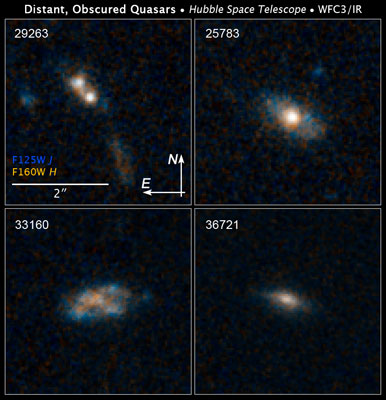

Compass and scale image

Quasars are the brilliant beacons of light that are powered by black holes feasting on captured material, and in the process, heating some of the matter to millions of degrees. The brightest quasars reside in galaxies distorted by collisions with other galaxies.

Credit: NASA, ESA/Hubble, and K. Schawinski (Yale University)